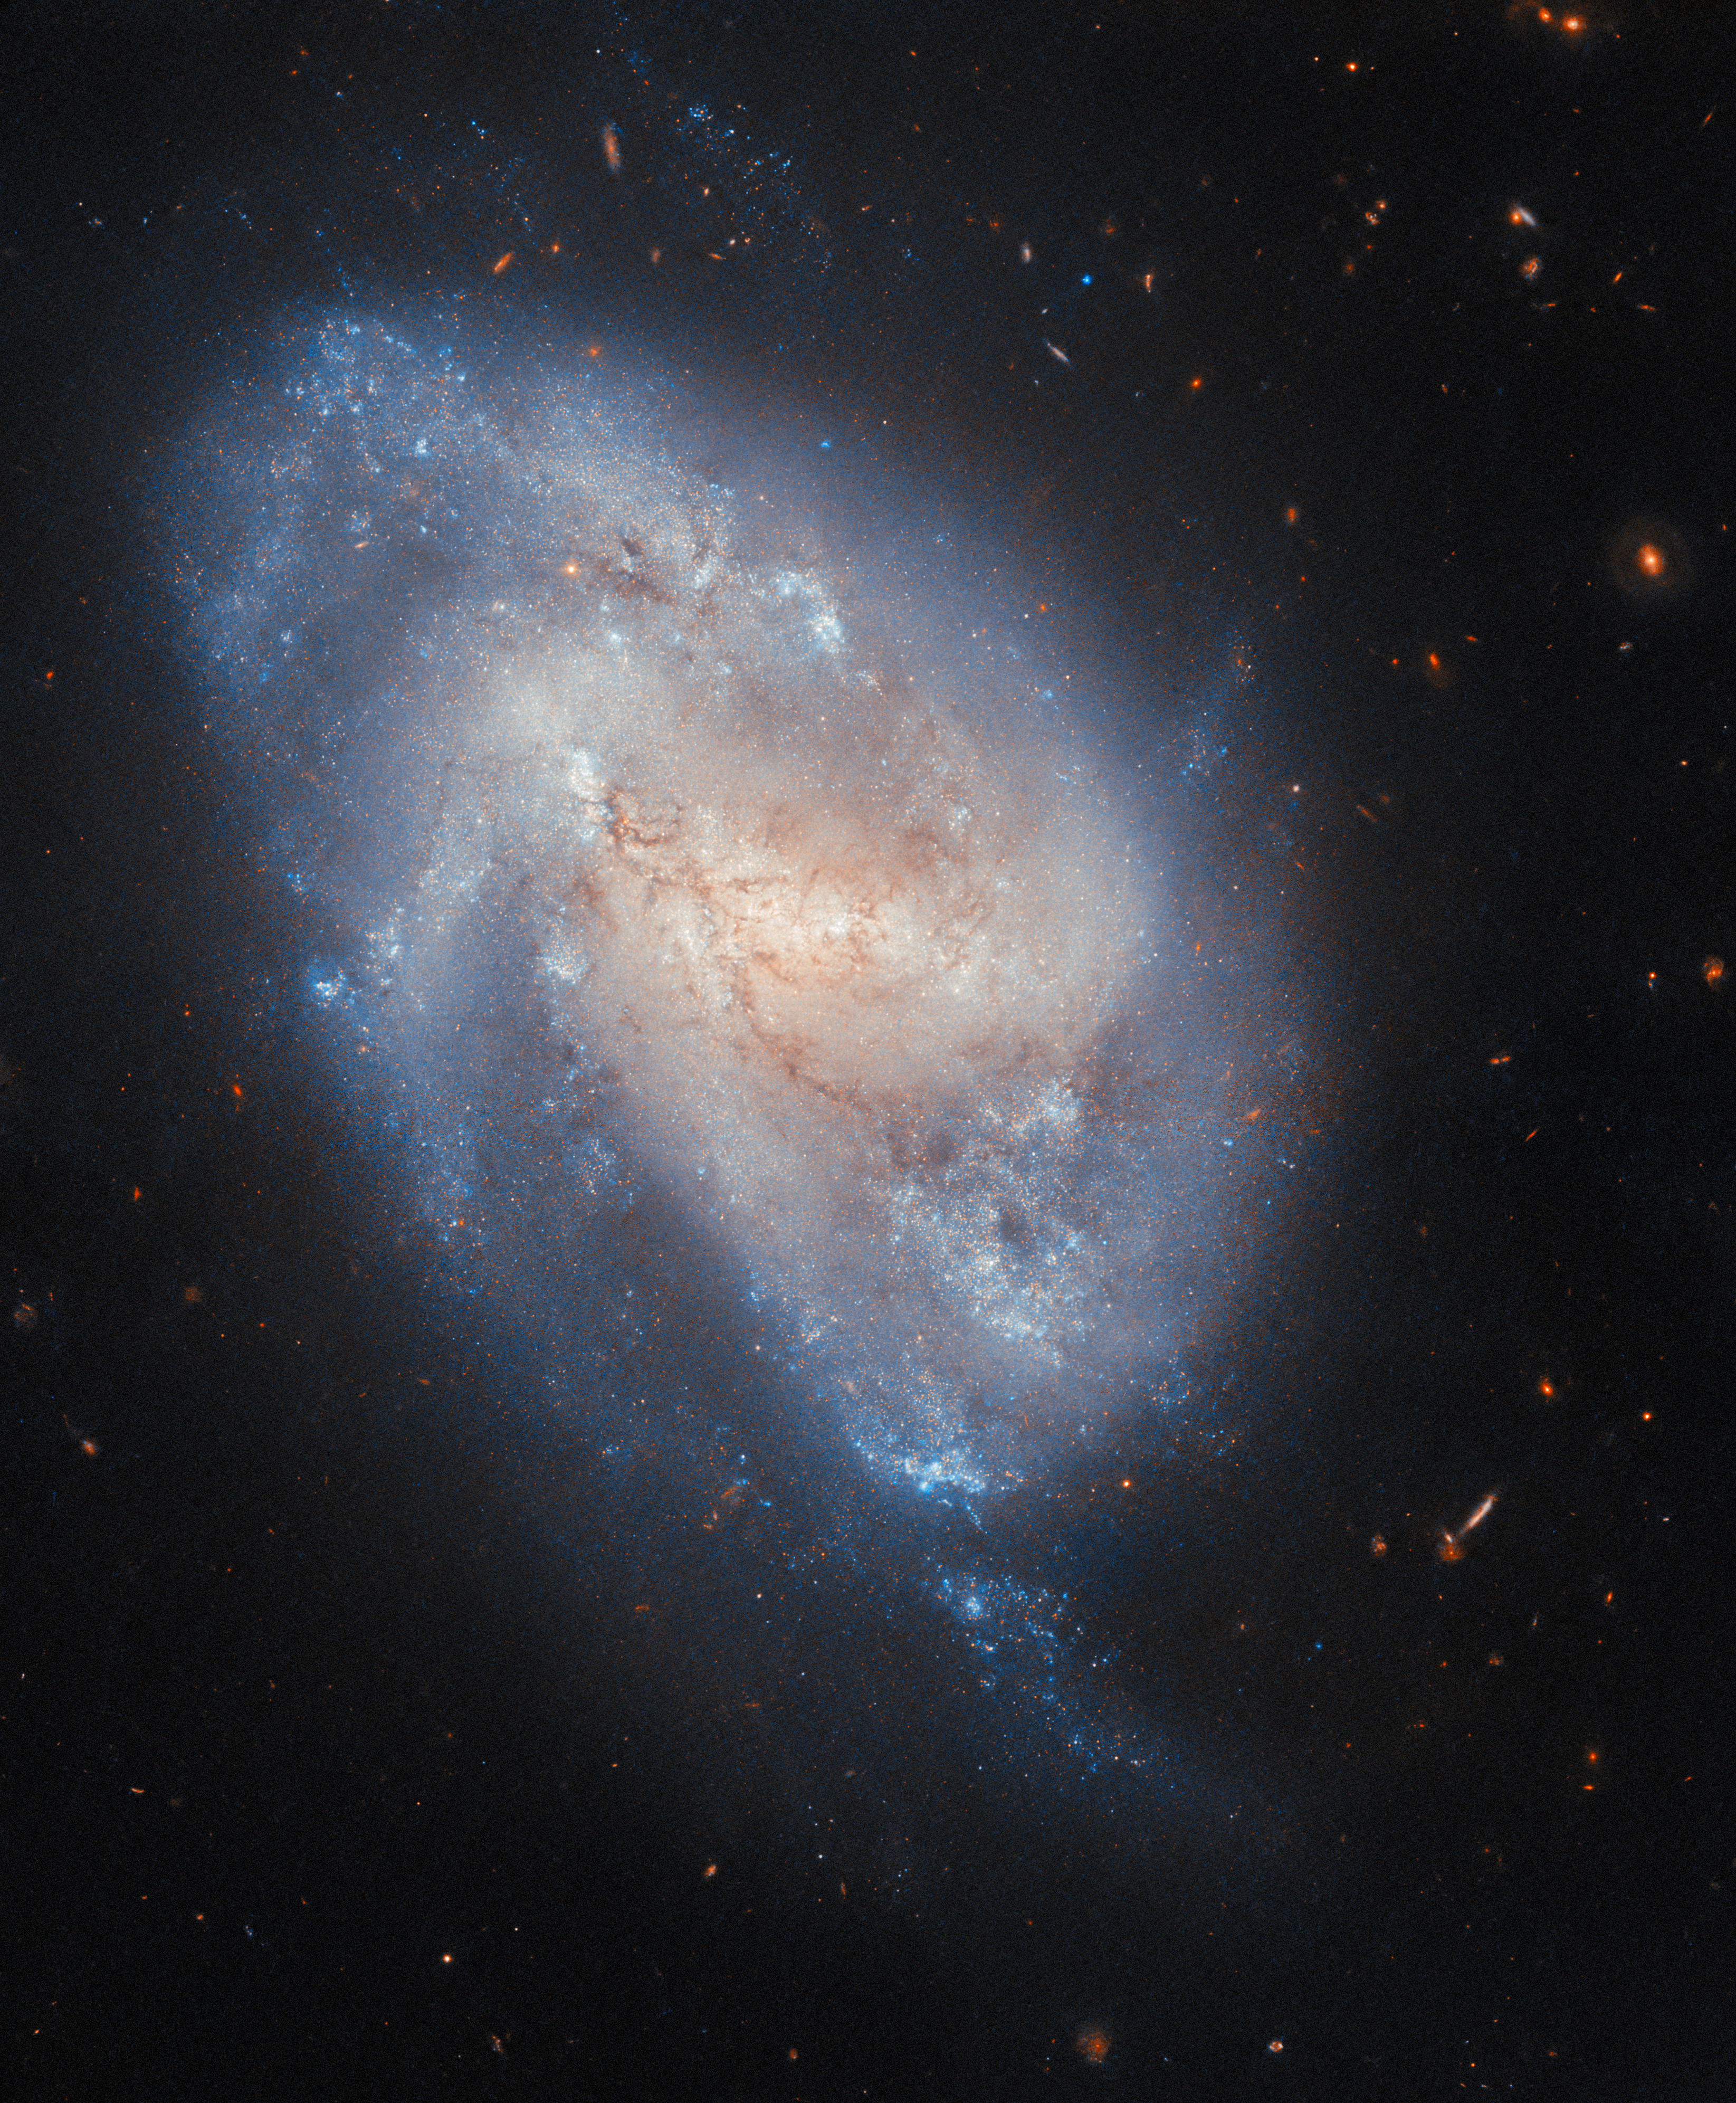

A supernova checkup

The subject of this NASA/ESA Hubble Space Telescope Picture of the Week is the spiral galaxy NGC 337, located about 60 million light-years away in the constellation Cetus (The Whale).

This image combines observations made at two wavelengths, highlighting the galaxy’s golden centre and blue outskirts. The golden central glow comes from older stars, while the sparkling blue edges get their colour from young stars. If Hubble had observed NGC 337 about a decade ago, the telescope would have spotted something remarkable among the hot blue stars along the galaxy’s edge: a brilliant supernova.

The supernova, named SN 2014cx, is remarkable for having been discovered nearly simultaneously in two vastly different ways: by a prolific supernova hunter, Koichi Itagaki, and by the All Sky Automated Survey for SuperNovae (ASAS-SN). ASAS-SN is a worldwide network of robotic telescopes that scans the sky for sudden events like supernovae.

Researchers have determined that SN 2014cx was a Type IIP supernova. The “Type II” classification means that the exploding star was a supergiant at least eight times as massive as the Sun. The “P” stands for plateau, meaning that after the light from the supernova began to fade, the level reached a plateau, remaining at the same brightness for several weeks or months before fading further. This type of supernova occurs when a massive star can no longer produce enough energy in its core to stave off the crushing pressure of gravity. SN 2014cx’s progenitor star is estimated to have been ten times more massive than the Sun and hundreds of times as wide. Though it has long since dimmed from its initial brilliance, researchers are still keeping tabs on this exploded star, not least through the Hubble observing programme which produced this image.

Credit: ESA/Hubble & NASA, C. Kilpatrick